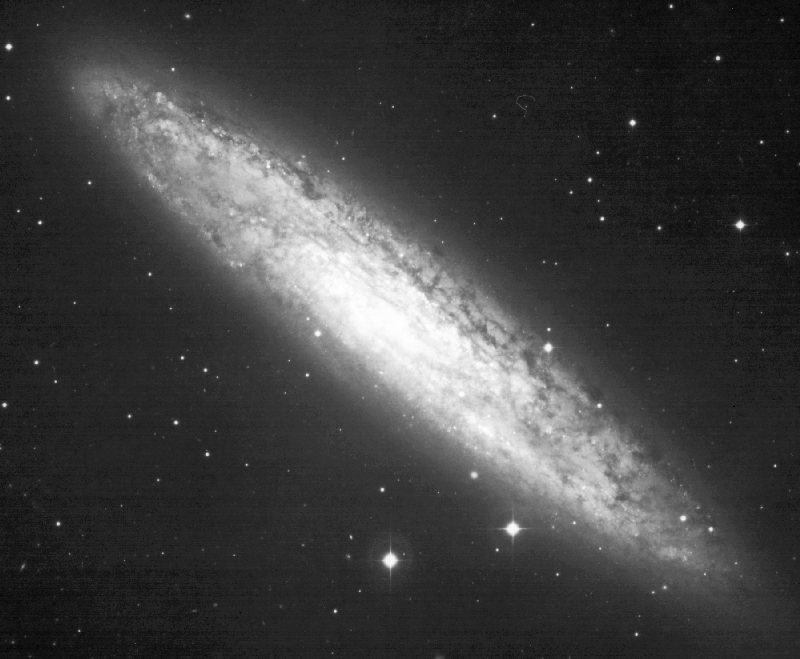

NGC 253

An image of the spiral galaxy NGC 253, taken with a ground-based telescope. The galaxy is located about 8 million light-years away in the constellation Sculptor.

Credit: Jay Gallagher (University of Wisconsin-Madison), Alan Watson (Lowell Observatory, Flagstaff, AZ), and NASA/ESA